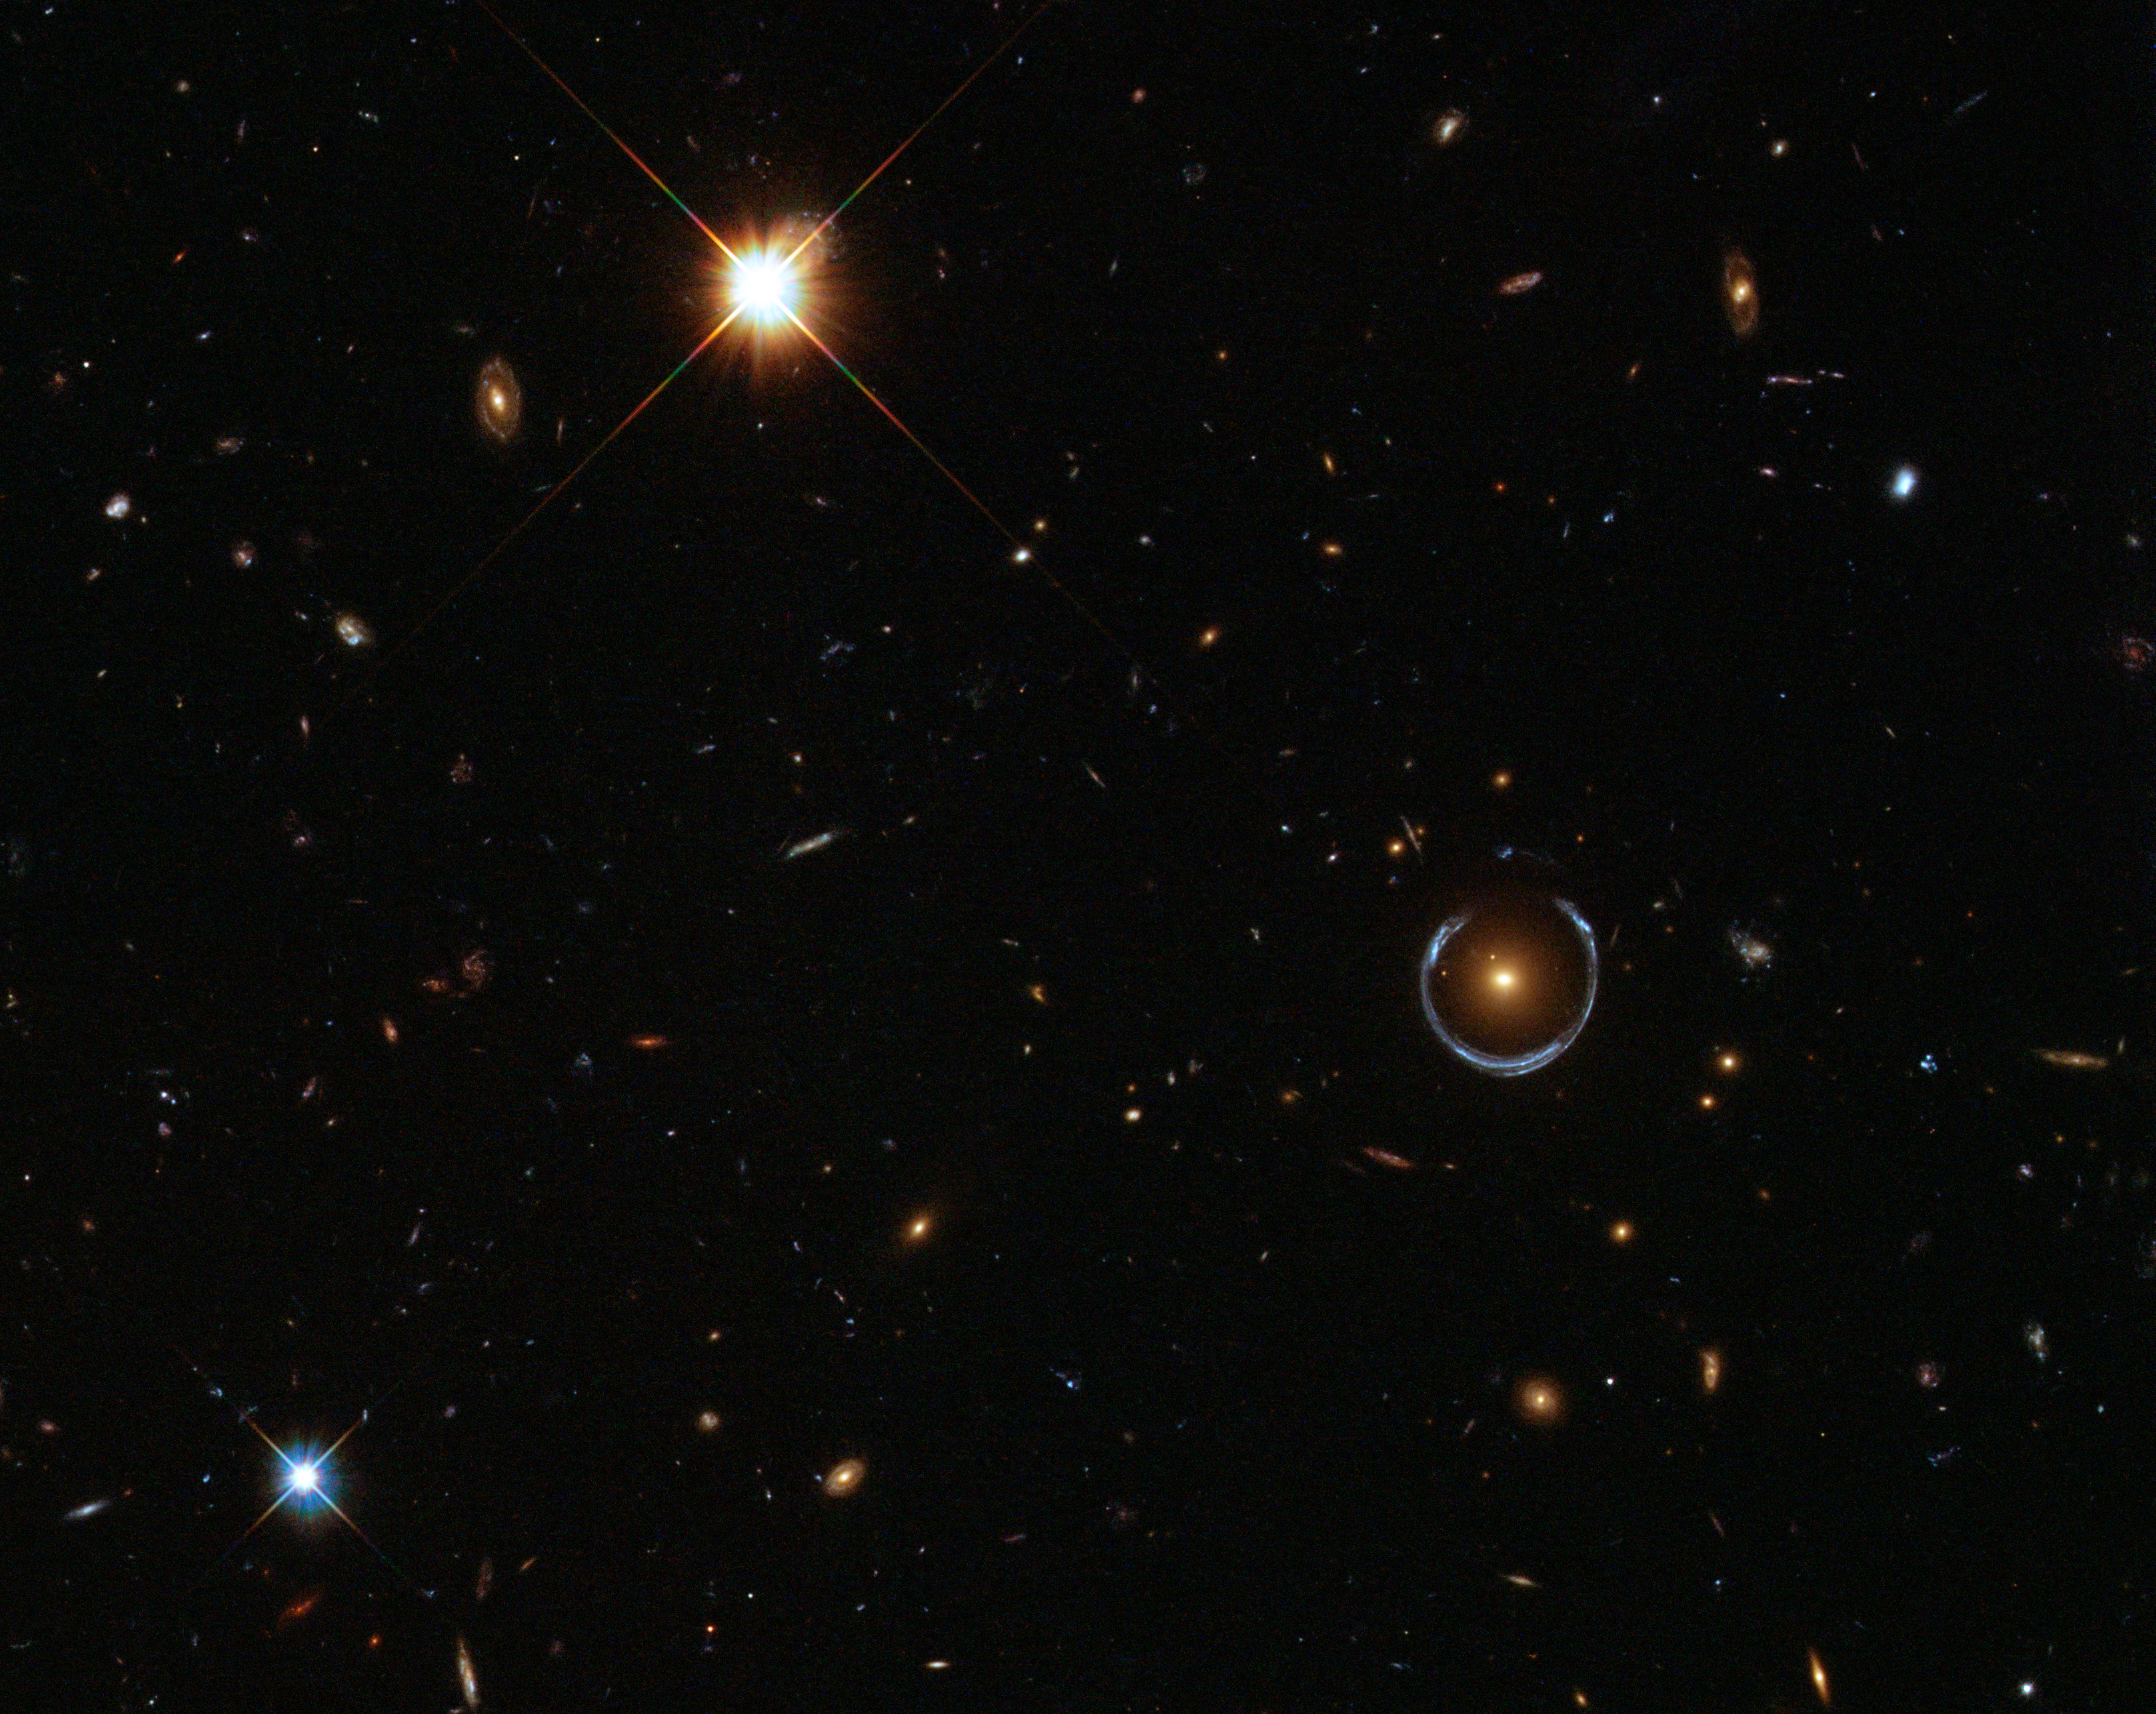

Hubble captures a “lucky” galaxy alignment

An interesting galaxy has been circled in this NASA/ESA Hubble Space Telescope image. The galaxy — one of a group of galaxies called Luminous Red Galaxies — has an unusually large mass, containing about ten times the mass of the Milky Way. However, it’s actually the blue horseshoe shape that circumscribes the red galaxy that is the real prize in this image.

This blue horseshoe is a distant galaxy that has been magnified and warped into a nearly complete ring by the strong gravitational pull of the massive foreground Luminous Red Galaxy. To see such a so-called Einstein Ring required the fortunate alignment of the foreground and background galaxies, making this object’s nickname “the Cosmic Horseshoe” particularly apt.

The Cosmic Horseshoe is one of the best examples of an Einstein Ring. It also gives us a tantalising view of the early Universe: the blue galaxy’s redshift — a measure of how the wavelength of its light has been stretched by the expansion of the cosmos — is approximately 2.4. This means we see it as it was about 3 billion years after the Big Bang. The Universe is now 13.7 billion years old.

Astronomers first discovered the Cosmic Horseshoe in 2007 using data from the Sloan Digital Sky Survey. But this Hubble image, taken with the Wide Field Camera 3, offers a much more detailed view of this fascinating object.

This picture was created from images taken in visible and infrared light on Hubble’s Wide Field Camera 3. The field of view is approximately 2.6 arcminutes wide.

Credit: ESA/Hubble & NASA